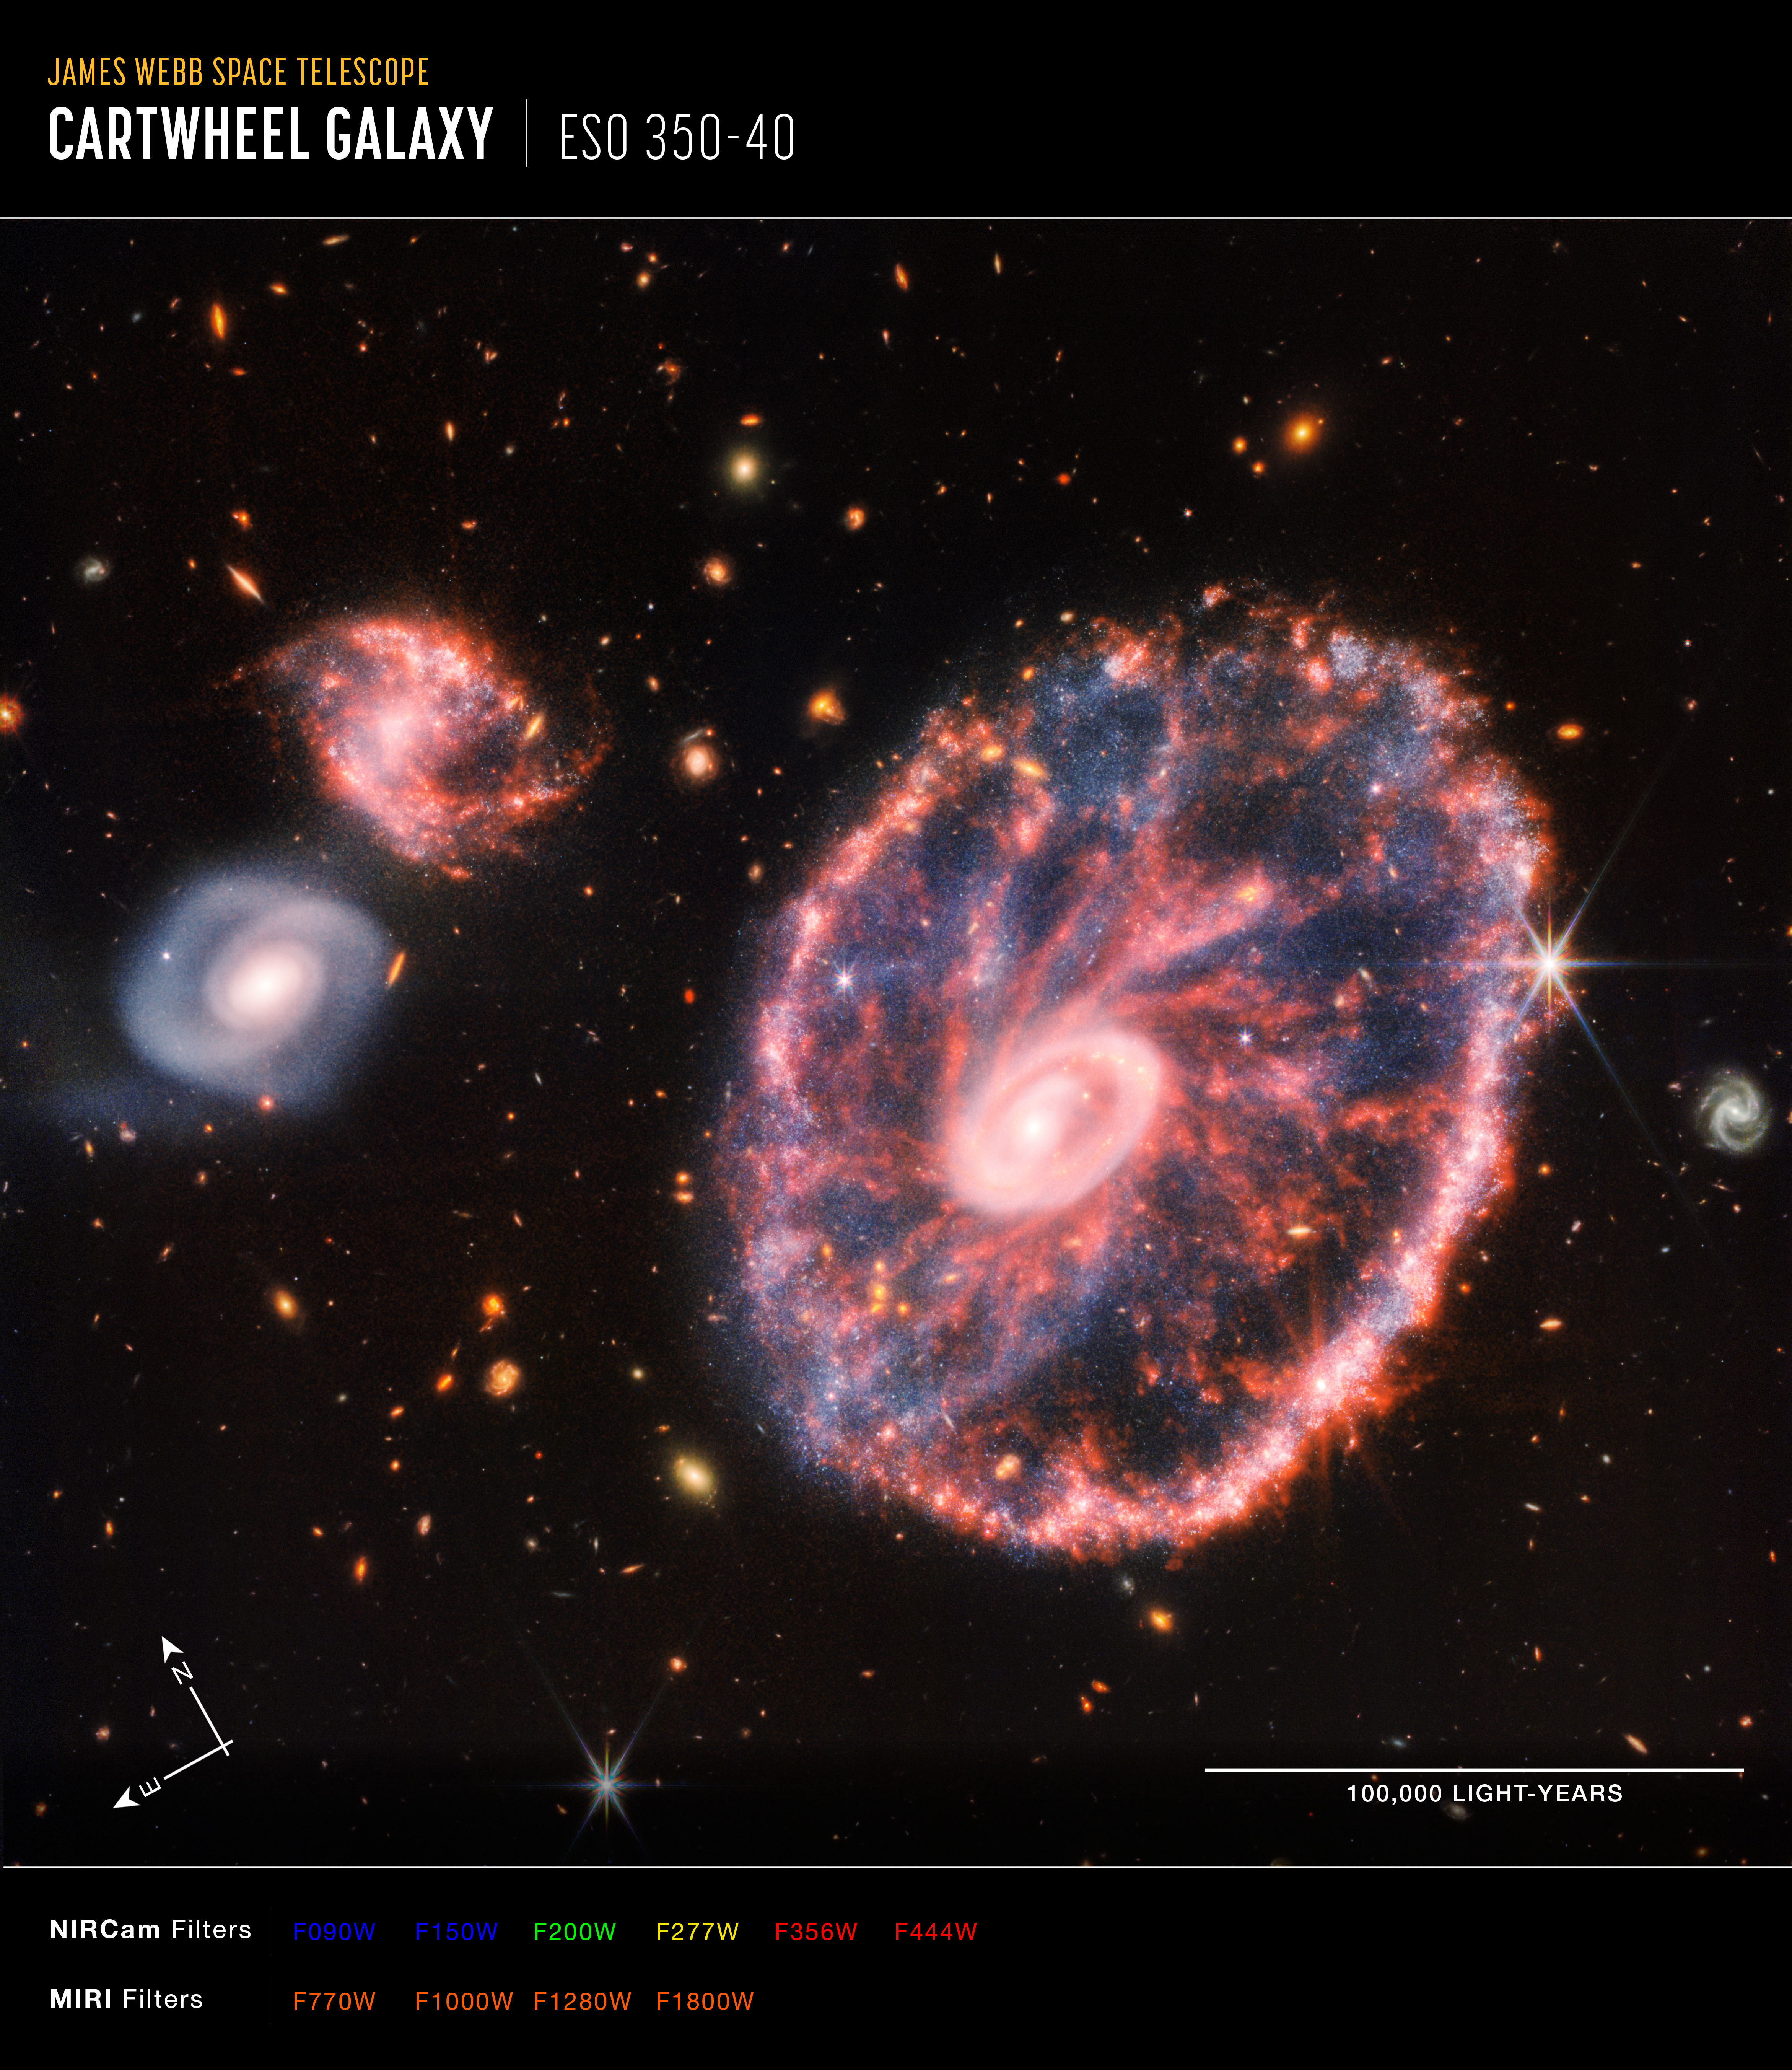

Cartwheel Galaxy (NIRCam and MIRI Composite Image) - Annotated

This image of the Cartwheel and its companion galaxies is a composite from Webb’s Near-Infrared Camera (NIRCam) and Mid-Infrared Instrument (MIRI), which reveals details that are difficult to see in the individual images alone.

This galaxy formed as the result of a high-speed collision that occurred about 400 million years ago. The Cartwheel is composed of two rings, a bright inner ring and a colourful outer ring. Both rings expand outward from the centre of the collision like shockwaves.

However, despite the impact, much of the character of the large, spiral galaxy that existed before the collision remains, including its rotating arms. This leads to the “spokes” that inspired the name of the Cartwheel Galaxy, which are the bright red streaks seen between the inner and outer rings. These brilliant red hues, located not only throughout the Cartwheel, but also the companion spiral galaxy at the top left, are caused by glowing, hydrocarbon-rich dust.

In this near- and mid-infrared composite image, MIRI data are coloured orange while NIRCam data are coloured blue, yellow, and red. Amidst the red swirls of dust, there are many individual blue dots, which represent individual stars or pockets of star formation. NIRCam also defines the difference between the older star populations and dense dust in the core and the younger star populations outside of it.

Webb’s observations capture Cartwheel in a very transitory stage. The form that the Cartwheel Galaxy will eventually take, given these two competing forces, is still a mystery. However, this snapshot provides perspective on what happened to the galaxy in the past and what it will do in the future.

NIRCam was built by a team at the University of Arizona and Lockheed Martin’s Advanced Technology Center.

MIRI was contributed by ESA and NASA, with the instrument designed and built by a consortium of nationally funded European Institutes (the MIRI European Consortium) in partnership with JPL and the University of Arizona.

Credit: NASA, ESA, CSA, STScI